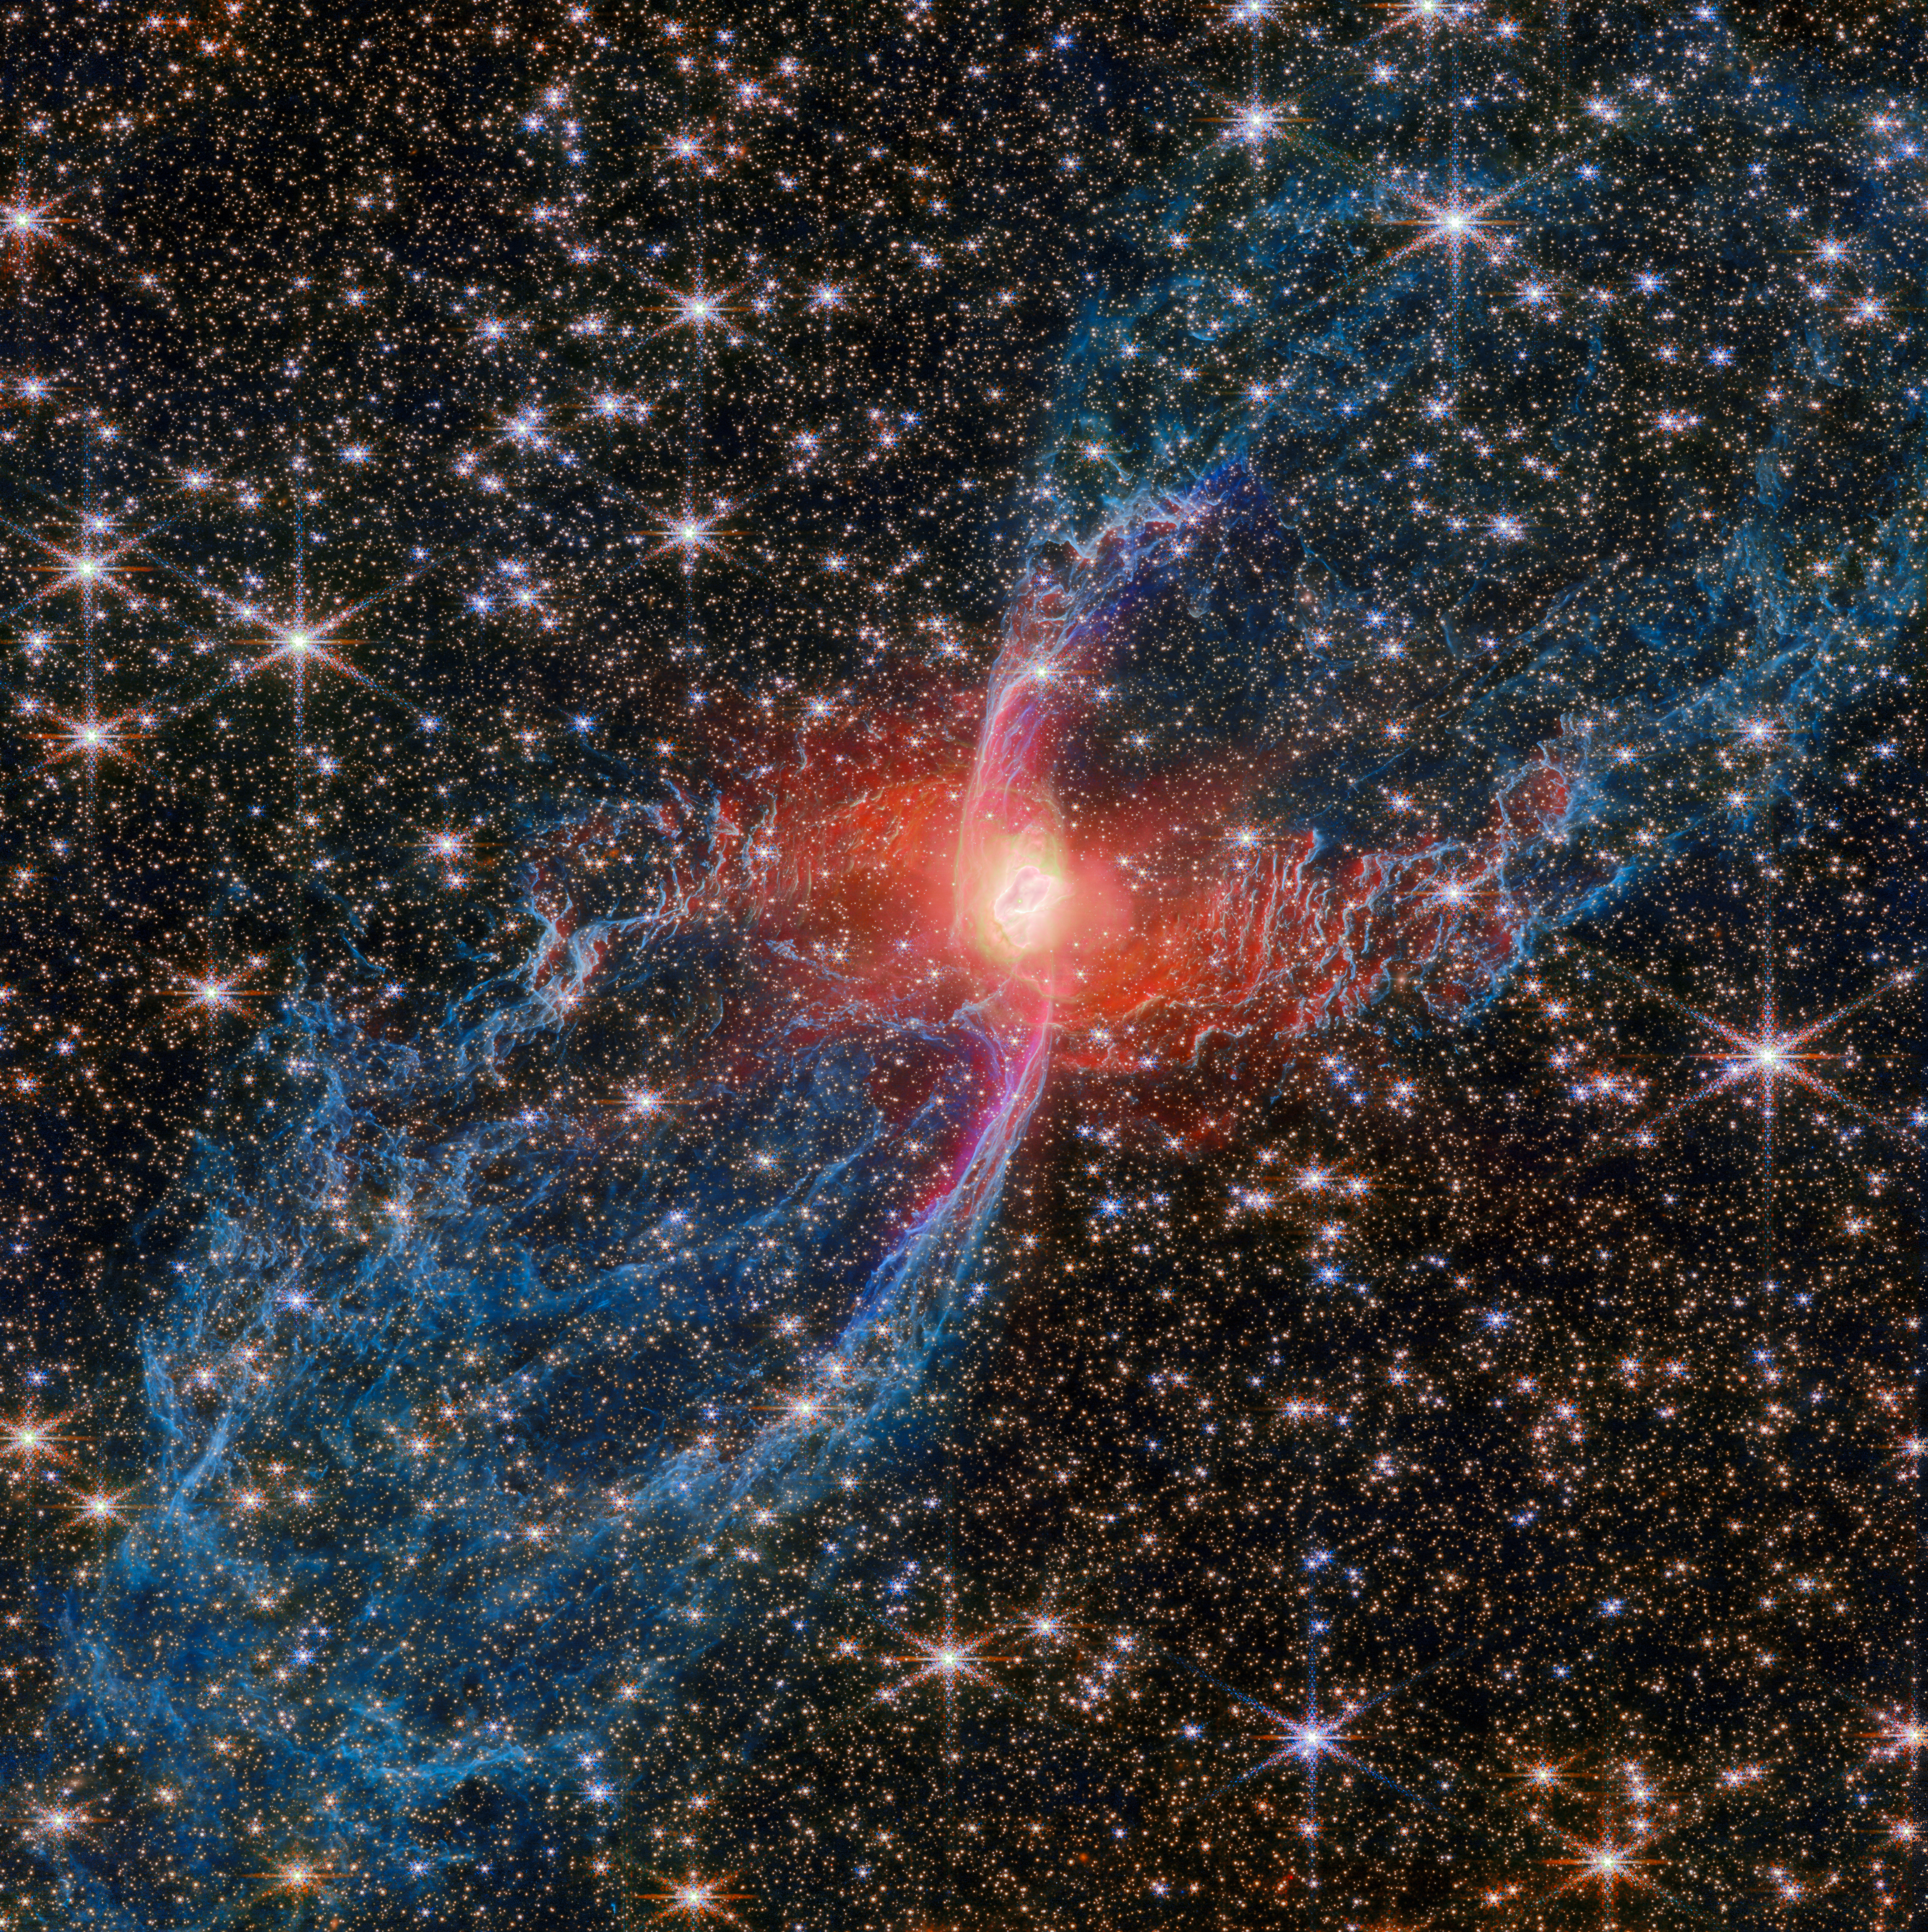

The Red Spider Nebula, caught by Webb

This new NASA/ESA/CSA James Webb Space Telescope Picture of the Month features a cosmic creepy-crawly called NGC 6537 — the Red Spider Nebula. Using its Near-InfraRed Camera (NIRCam), Webb has revealed never-before-seen details in this picturesque planetary nebula with a rich backdrop of thousands of stars.

Planetary nebulae like the Red Spider Nebula form when ordinary stars like the Sun reach the end of their lives. After ballooning into cool red giants, these stars shed their outer layers and cast them into space, exposing their white-hot cores. Ultraviolet light from the central star ionises the cast-off material, causing it to glow. The planetary nebula phase of a star’s life is as fleeting as it is beautiful, lasting only a few tens of thousands of years.

The central star of the Red Spider Nebula is visible in this image, glowing just brighter than the webs of dusty gas that surround it. The surprising nature of the nebula’s tremendously hot and luminous central star has been revealed by Webb’s NIRCam. In optical-wavelength images, such as from the NASA/ESA Hubble Space Telescope, the star appears faint and blue. But in the NIRCam images, it shows up as red: thanks to its sensitive near-infrared capabilities, Webb has revealed a shroud of hot dust surrounding the central star. This hot dust likely orbits the central star, in a disc structure.

Though only a single star is visible in the Red Spider’s heart, a hidden companion star may lurk there as well. A stellar companion could explain the nebula’s shape, including its characteristic narrow waist and wide outflows. This hourglass shape is seen in other planetary nebulae such as the Butterfly Nebula, which Webb also recently observed.

Webb’s new view of the Red Spider Nebula reveals for the first time the full extent of the nebula’s outstretched lobes, which form the ‘legs’ of the spider. These lobes, shown in blue, are traced by light emitted from H2 molecules, which contain two hydrogen atoms bonded together. Stretching over the entirety of NIRCam’s field of view, these lobes are shown to be closed, bubble-like structures that each extend about 3 light-years. Outflowing gas from the centre of the nebula has inflated these massive bubbles over thousands of years.

Gas is also actively jetting out from the nebula’s centre, as these new Webb observations show. An elongated purple ‘S’ shape centred on the heart of the nebula follows the light from ionised iron atoms. This feature marks where a fast-moving jet has emerged from near the nebula’s central star and collided with material that was previously cast away by the star, sculpting the rippling structure of the nebula seen today.

The observations used to create this image come from Webb GO programme #4571 (PI: J. Kastner) as part of a joint Chandra-JWST observing programme, which aims to understand how bipolar planetary nebulae like the Red Spider Nebula are shaped by the outflows and jets that emerge from the stars at their cores.

Credit: ESA/Webb, NASA & CSA, J. H. Kastner (Rochester Institute of Technology)